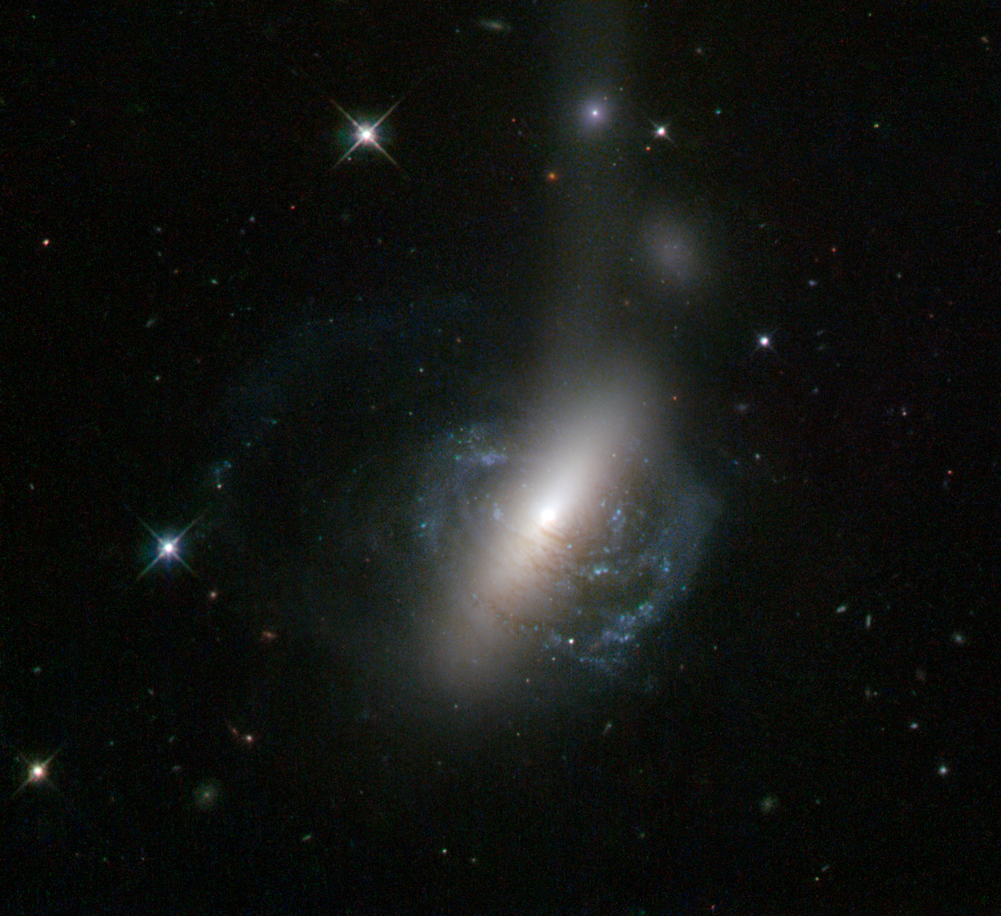

The messy result of a galactic collision

This new image from the NASA/ESA Hubble Space Telescope captures an ongoing cosmic collision between two galaxies — a spiral galaxy is in the process of colliding with a lenticular galaxy. The collision looks almost as if it is popping out of the screen in 3D, with parts of the spiral arms clearly embracing the lenticular galaxy’s bulge.

The image also reveals further evidence of the collision. There is a bright stream of stars coming out from the merging galaxies, extending out towards the right of the image. The bright spot in the middle of the plume, known as ESO 576-69, is what makes this image unique. This spot is believed to be the nucleus of the former spiral galaxy, which was ejected from the system during the collision and is now being shredded by tidal forces to produce the visible stellar stream.

A version of this image was entered into the Hubble’s Hidden Treasures image processing competition by contestant Luca Limatola.

Credit: ESA/Hubble & NASA Acknowledgement: Luca Limatola